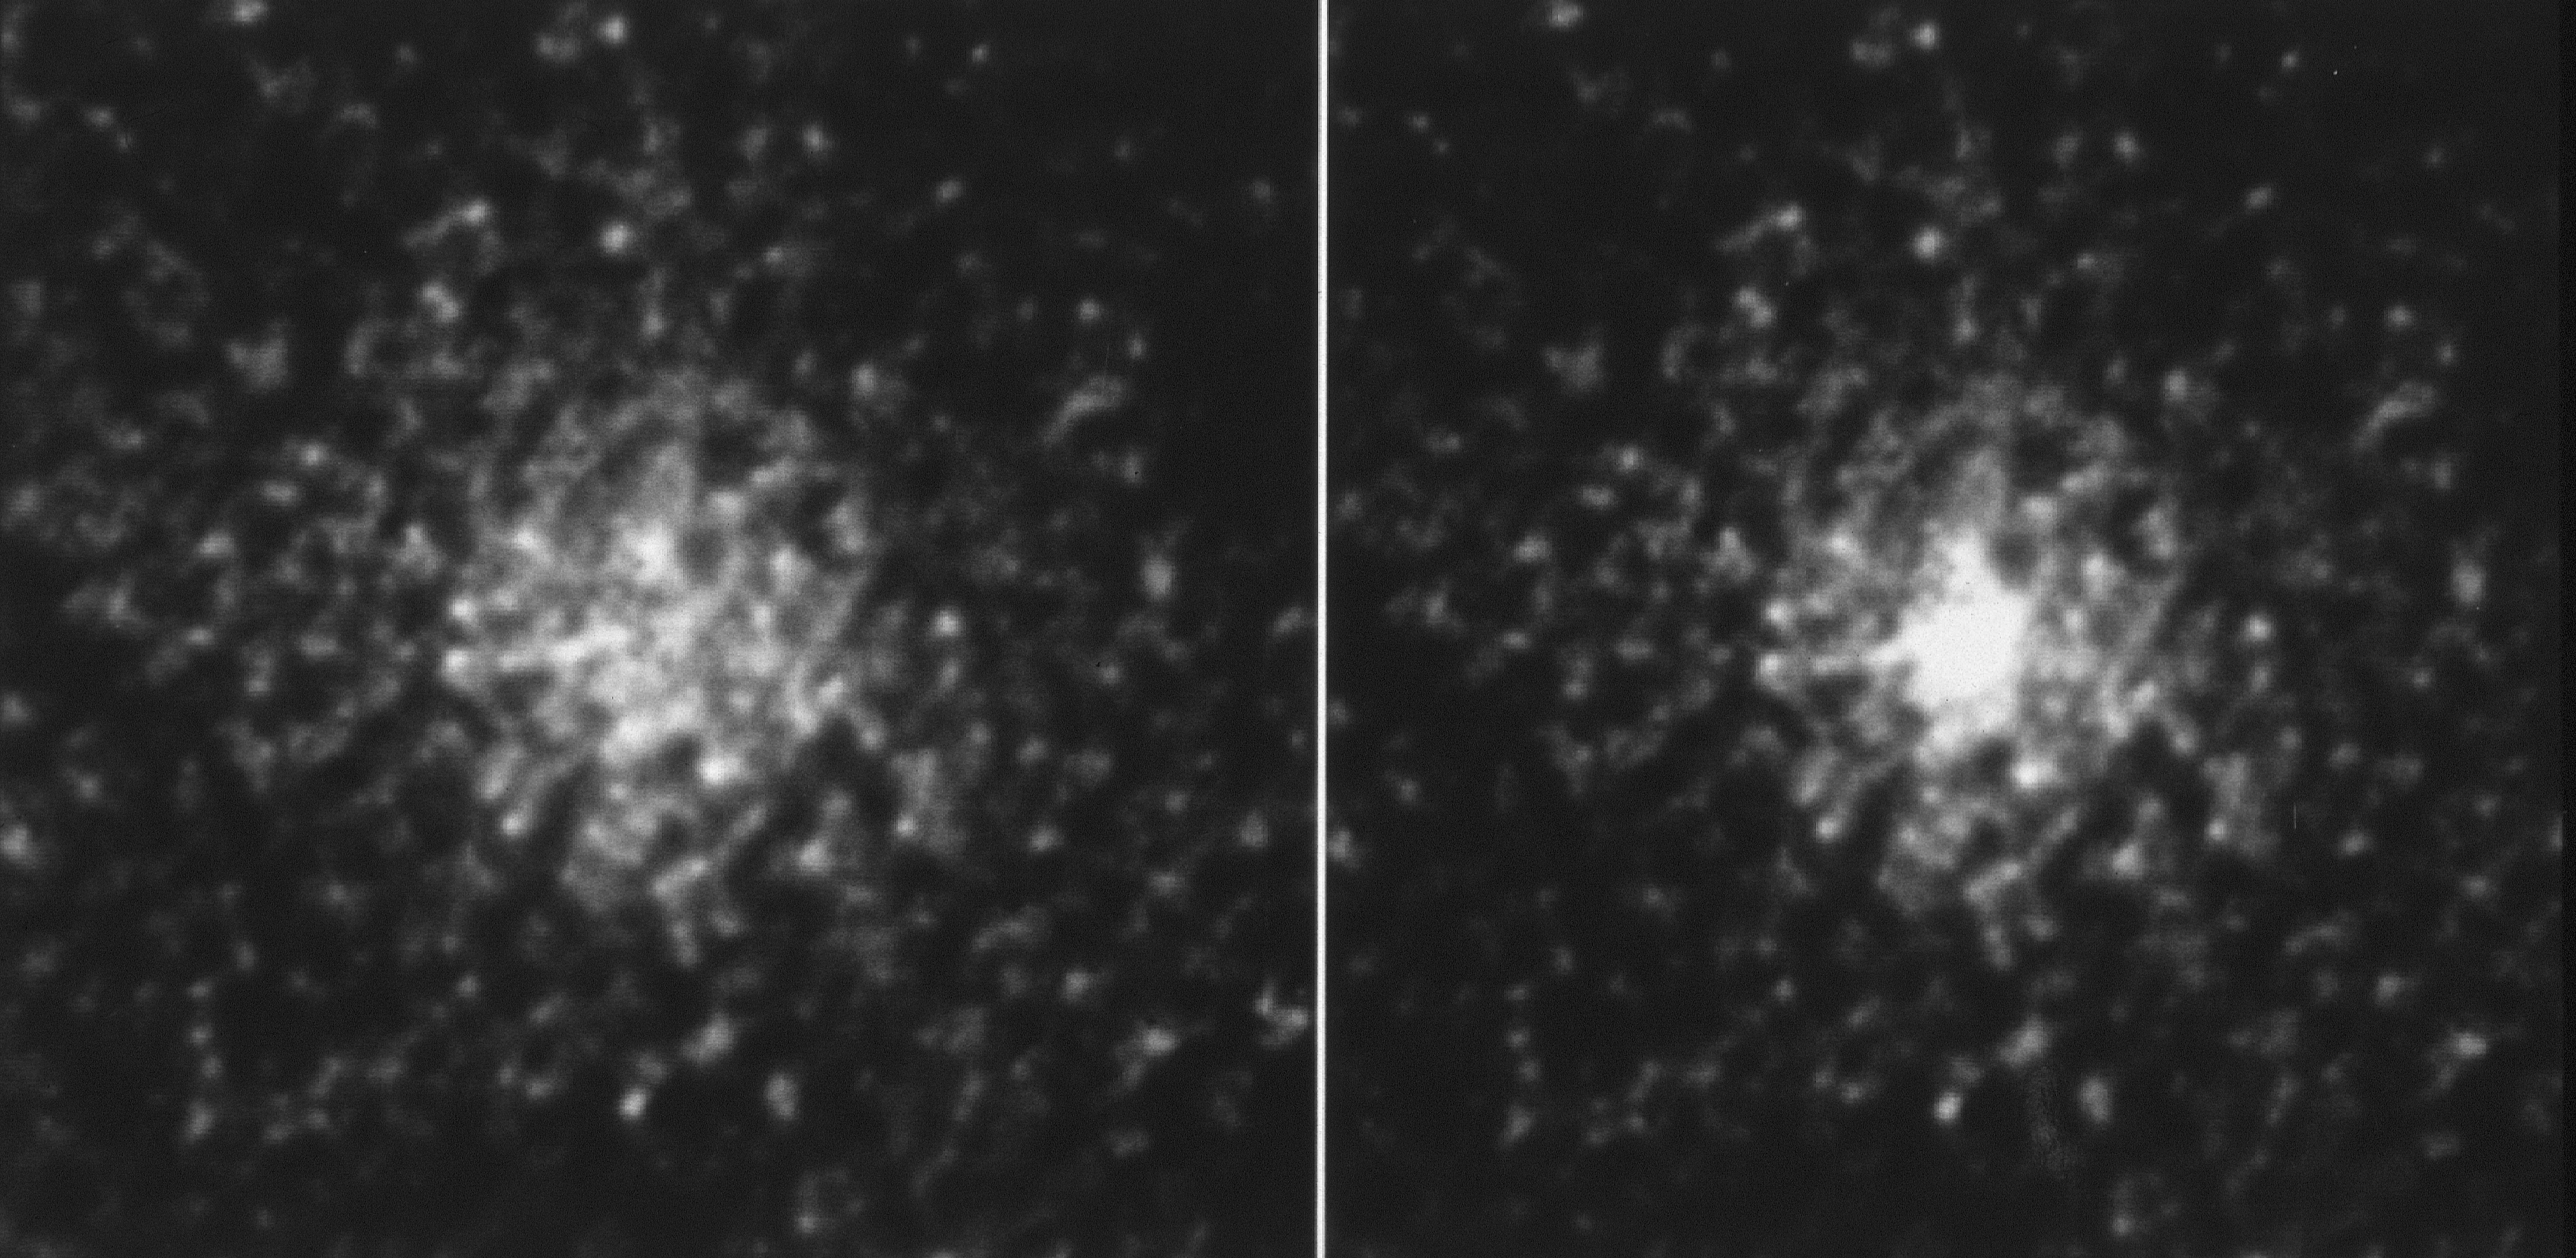

M15 globular cluster core

Hubble reveals the evolving core of this dense star cluster.

Credit: NASA/ESA